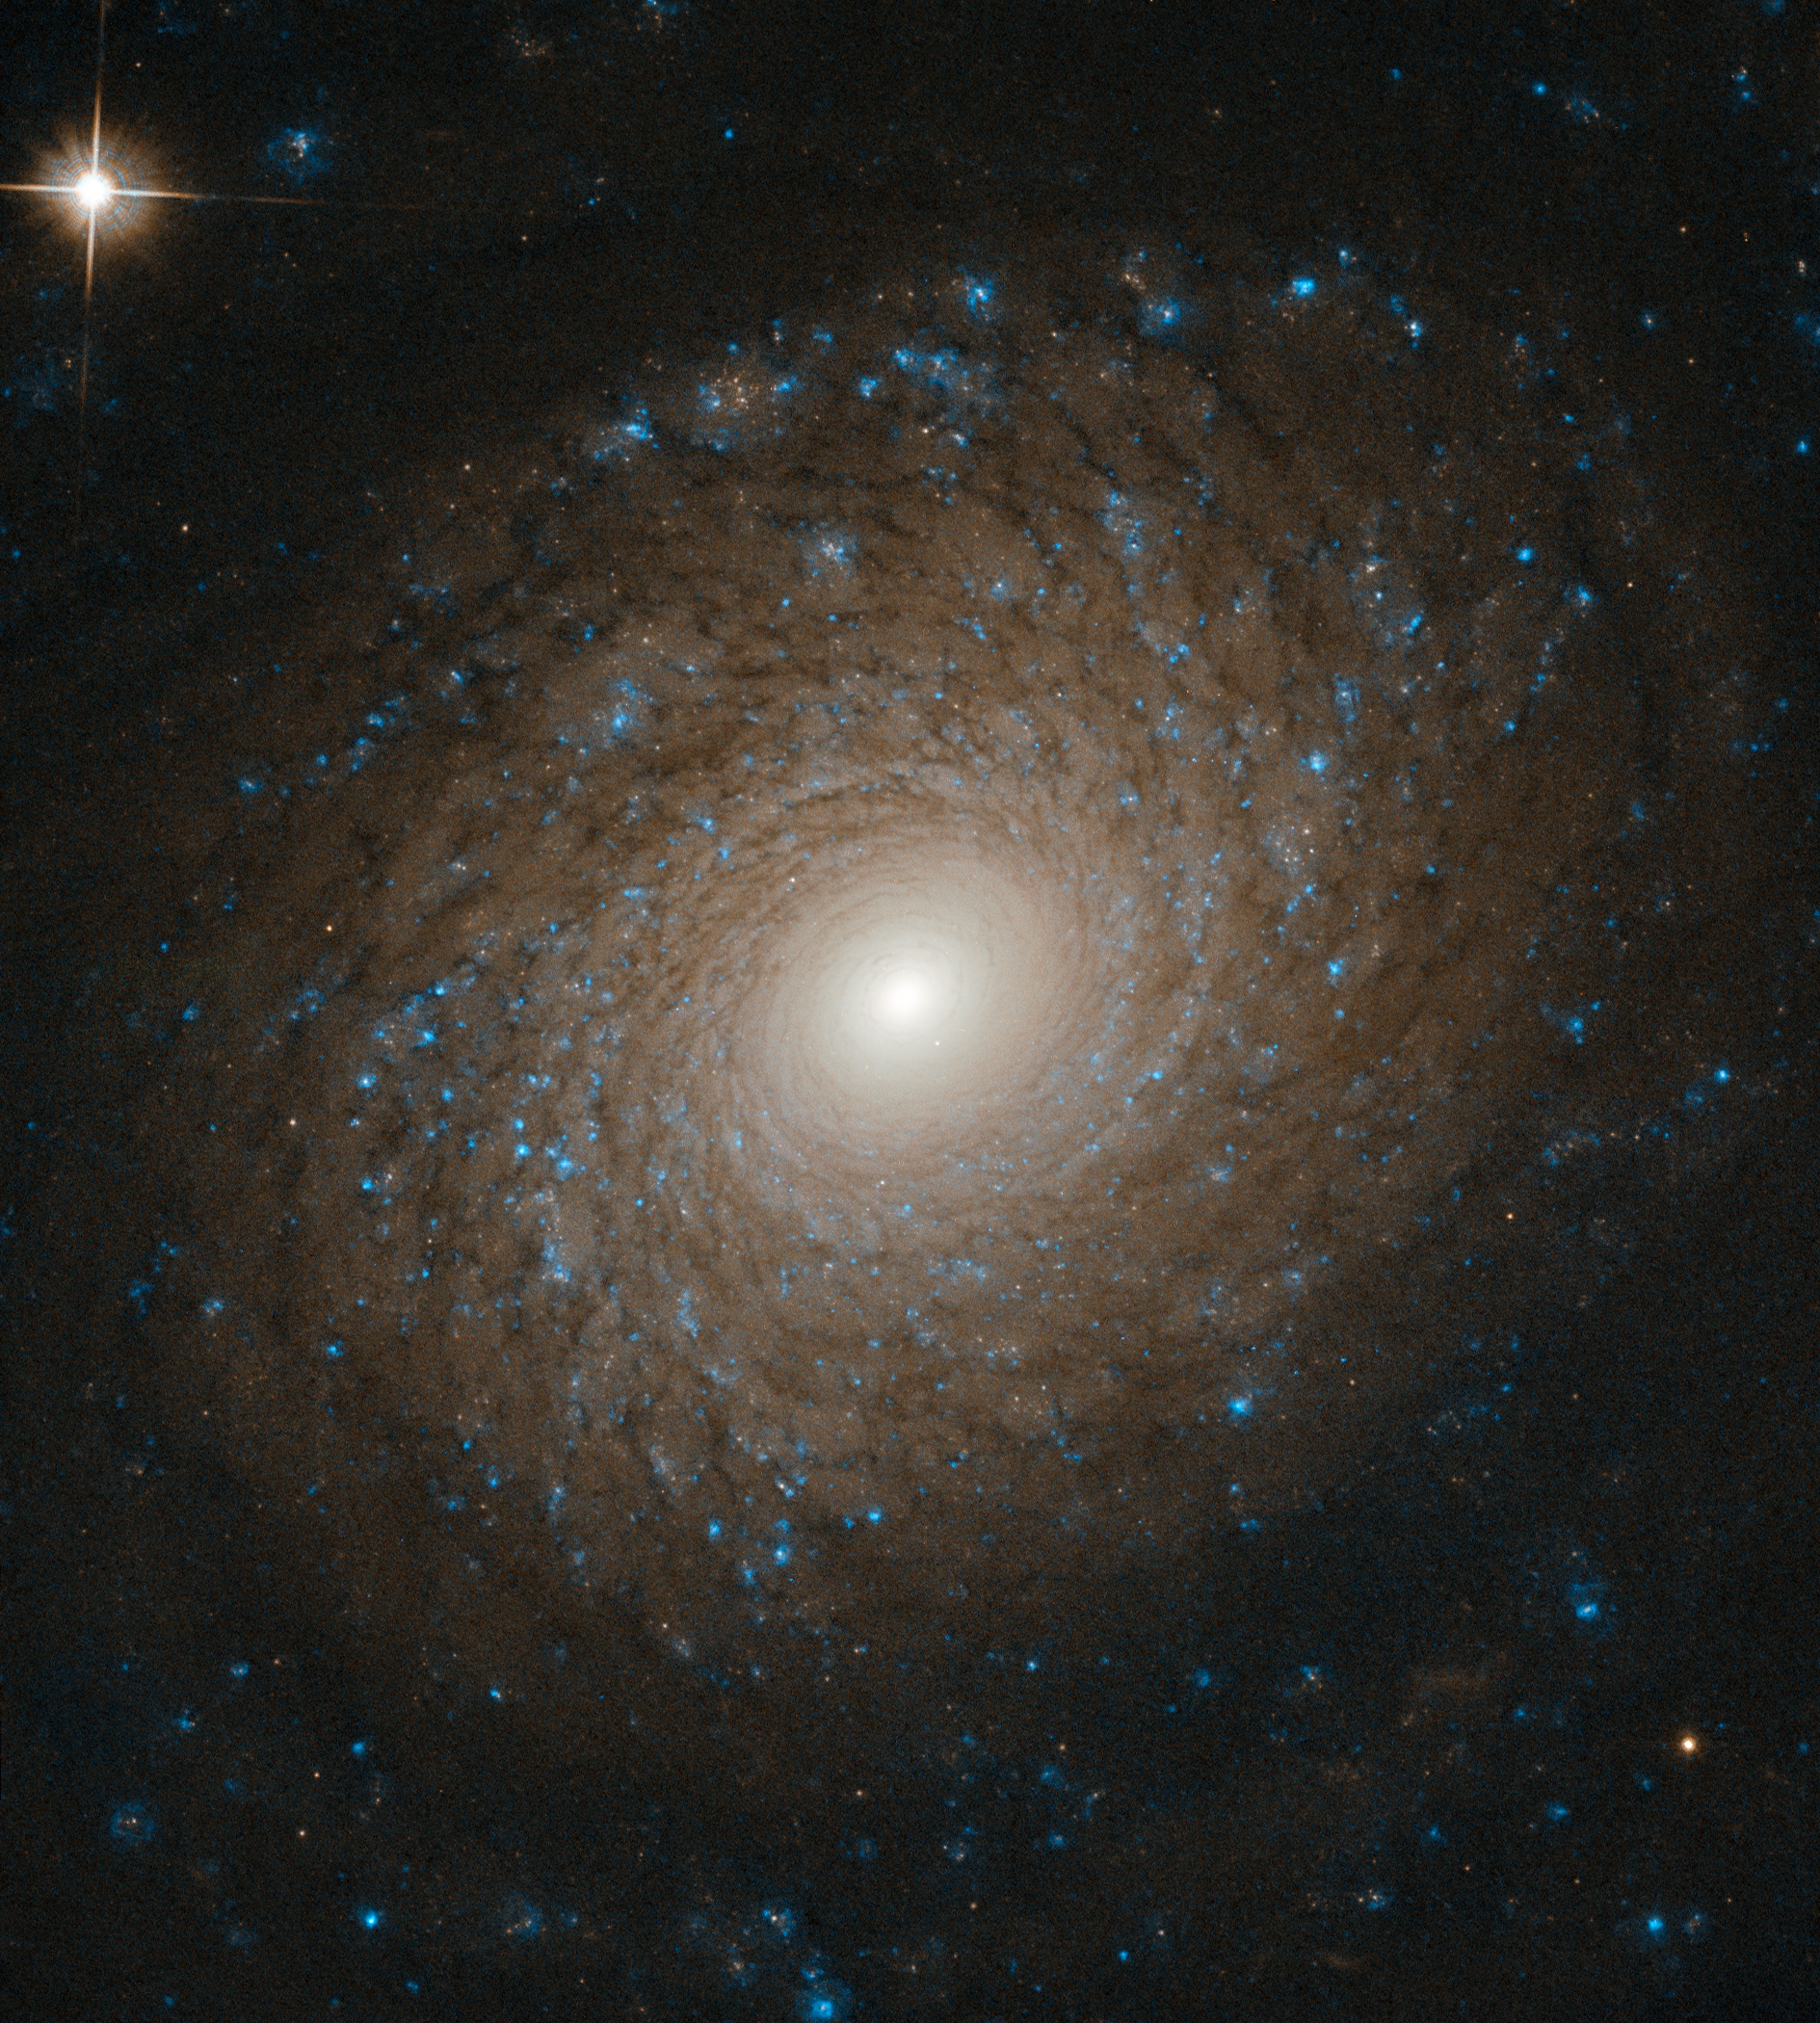

A Beautiful Whorl

Galaxies come in many shapes and sizes. One of the key galaxy types we see in the Universe is the spiral galaxy, as demonstrated in an especially beautiful way by the subject of this Hubble Picture of the Week, NGC 2985. NGC 2985 lies roughly over 70 million light years from the Solar System in the constellation of Ursa Major (The Great Bear).

The intricate, near-perfect symmetry on display here reveals the incredible complexity of NGC 2985. Multiple tightly-wound spiral arms widen as they whorl outward from the galaxy’s bright core, slowly fading and dissipating until these majestic structures disappear into the emptiness of intergalactic space, bringing a beautiful end to their starry splendour.

Over aeons, spiral galaxies tend to run into other galaxies, often resulting in mergers. These coalescing events scramble the winding structures of the original galaxies, smoothing and rounding their shape. These objects possess a beauty all their own, distinct from the spiral galaxies from whence they came.

Credit: ESA/Hubble & NASA, L. Ho